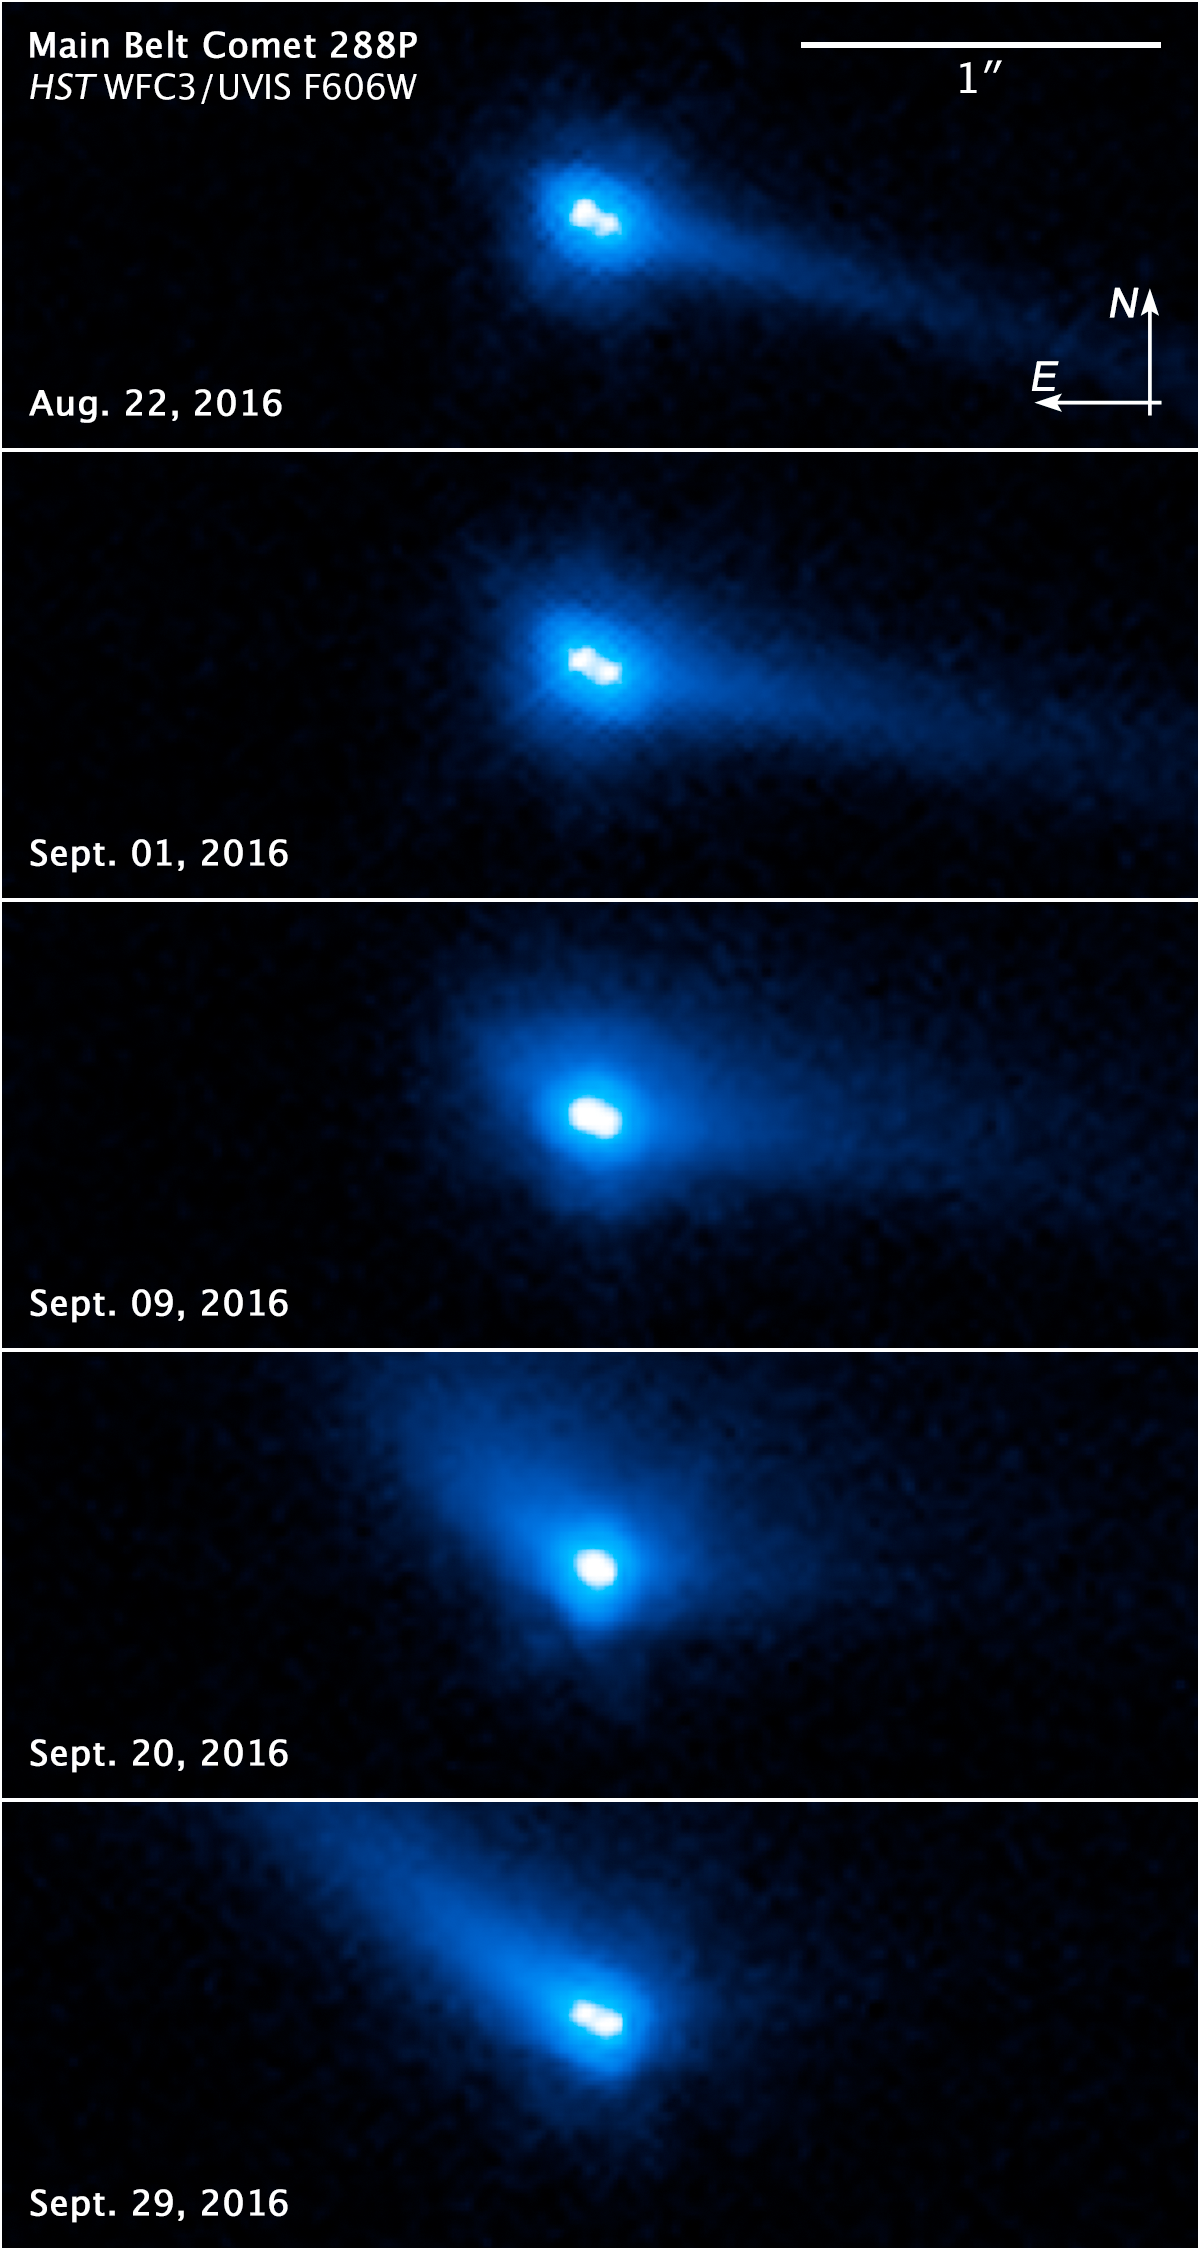

Image of binary asteroid system 288P

This set of images from the ESA/NASA Hubble Space Telescope reveals two asteroids with comet-like features orbiting each other. These include a bright halo of material, called a coma, and a long tail of dust. The asteroid pair, called 288P, was observed in September 2016 just before the asteroid made its closest approach to the Sun.

These images reveal ongoing activity in the binary system. The apparent movement of the tail is a projection effect due to the relative alignment between the Sun, Earth, and 288P changing between observations. The tail orientation is also affected by a change in the particle size. Initially, the tail was pointing towards the direction where comparatively large dust particles (about 1 millimetre in size) were emitted in late July. However, from 20 September 2016 onwards, the tail began to point in the opposite direction from the Sun where small particles (about 10 microns in size) are blown away from the nucleus by radiation pressure.

Credit: NASA, ESA, and J. Agarwal (Max Planck Institute for Solar System Research)